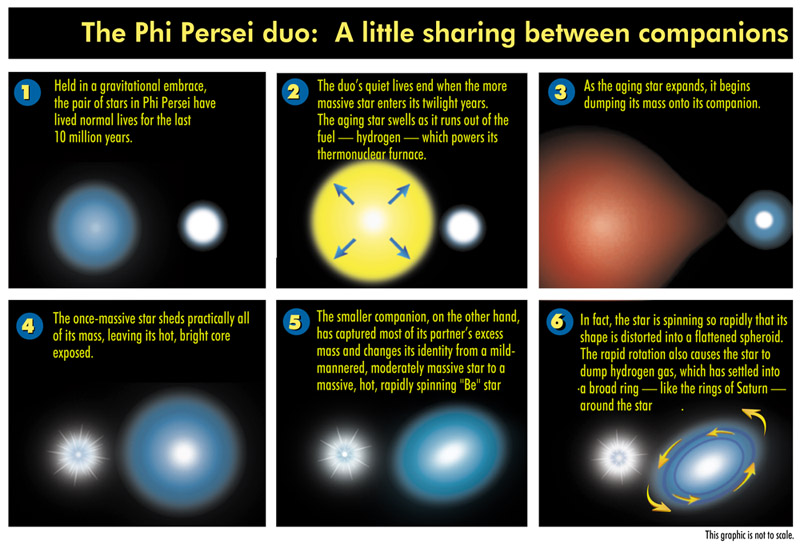

The Phi Persei duo

The Phi Persei Duo: A little sharing between companions.

Credit: Ann Feild (STScI)